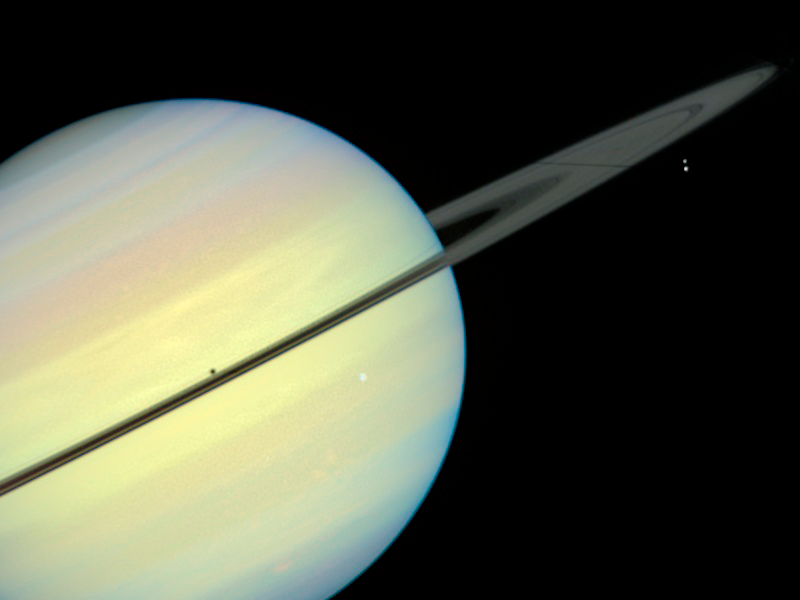

Saturn's Moons - Frame 5

This movie still captures the moons Mimas, Enceladus, and Dione as they begin their race across Saturn's disk. The still is from a movie created from images taken by NASA/ESA Hubble Space Telescope. It reveals the planet's rings tilted nearly edge-on toward the Sun, an event that occurs once every 15 years. Because of this special alignment, the moons cast shadows on the planet and its rings.

Credit: NASA/ESA and E. Karkoschka (University of Arizona)